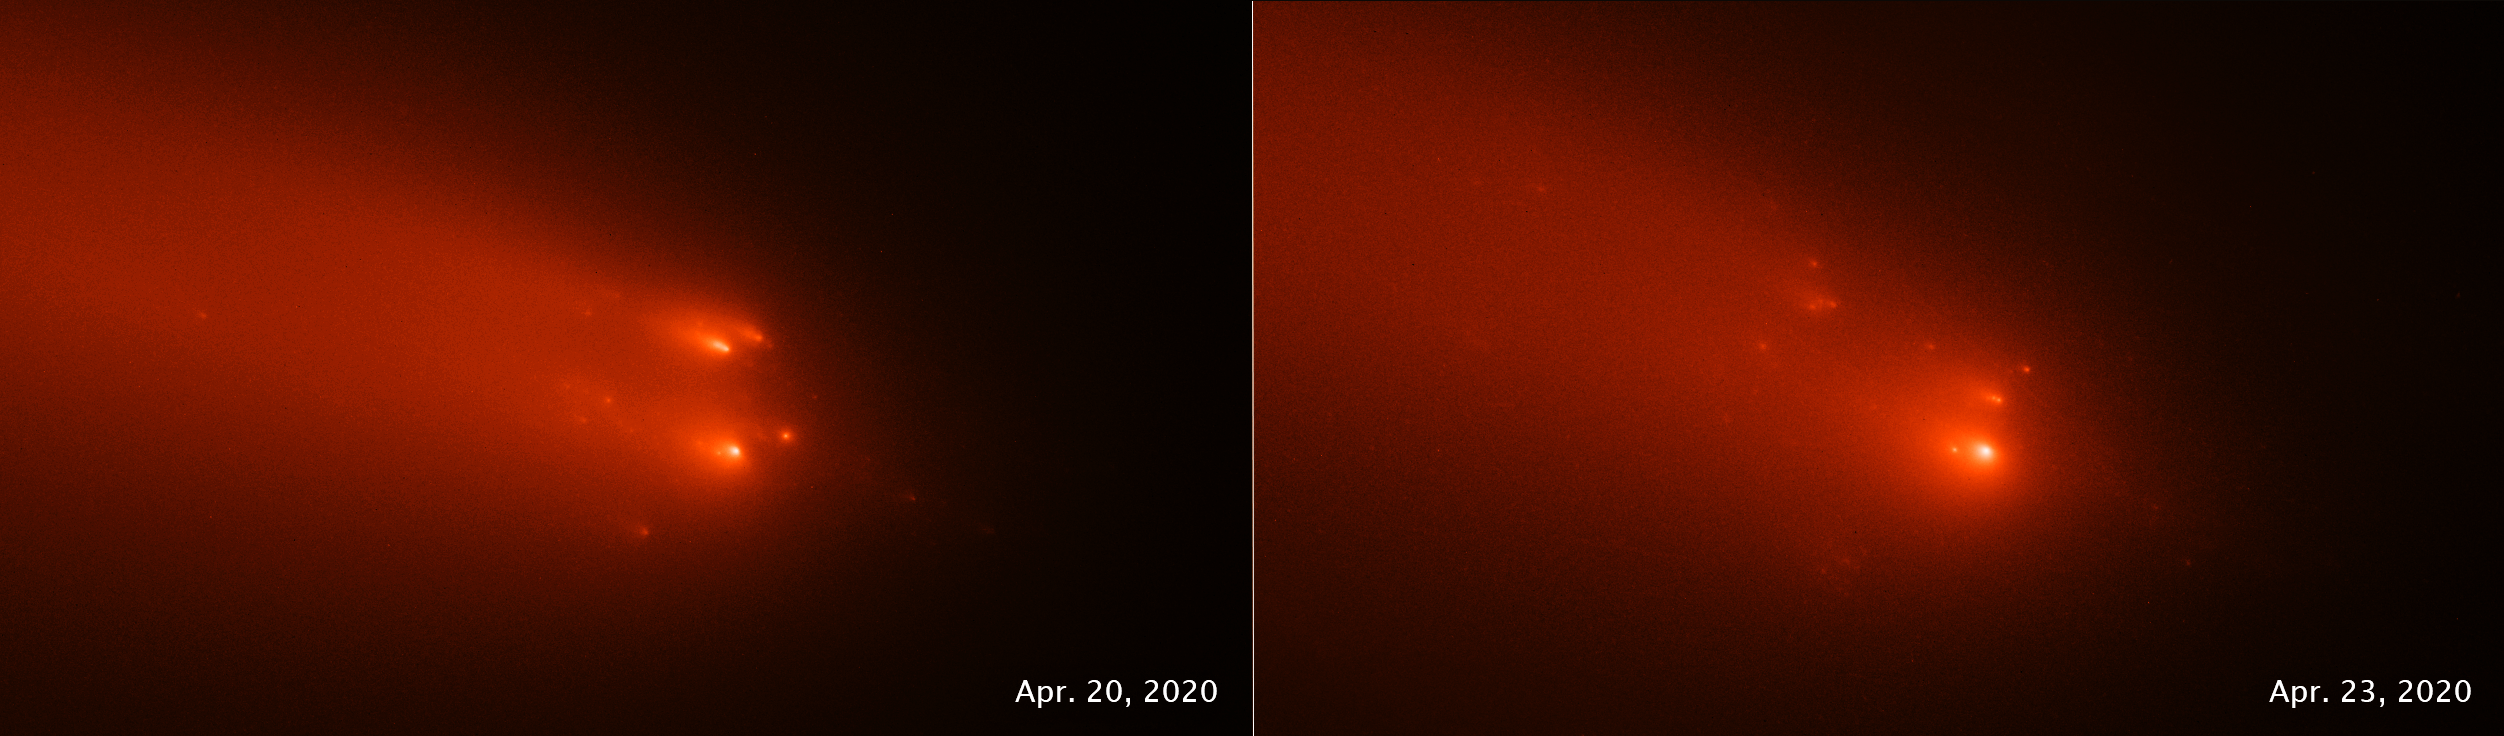

Comet blast from the past

This pair of NASA/ESA Hubble Space Telescope images of comet C/2019 Y4 (ATLAS), taken on April 20 and April 23, 2020, reveal the breakup of the solid nucleus of the comet. Hubble photos identify as many as 30 separate fragments. The comet was approximately 146 million kilometres from Earth when the images were taken. The comet may be a broken off piece of a larger comet that swung by the Sun 5,000 years ago.

The comet has been artificially colored in this view to enhance details for analysis.

In a new study using Hubble’s observations, astronomer Quanzhi Ye of the University of Maryland in College Park, reports that ATLAS is a broken-off piece of that ancient visitor from 5,000 years ago. This is because ATLAS follows the same orbital "railroad track" as that of a comet seen in 1844. This means the two comets are probably siblings from a parent comet that broke apart many centuries earlier. The link between the two comets was first noted by amateur astronomer Maik Meyer.

Credit: NASA, ESA, STScI, Quanzhi Ye (UMD), Alyssa Pagan (STScI)